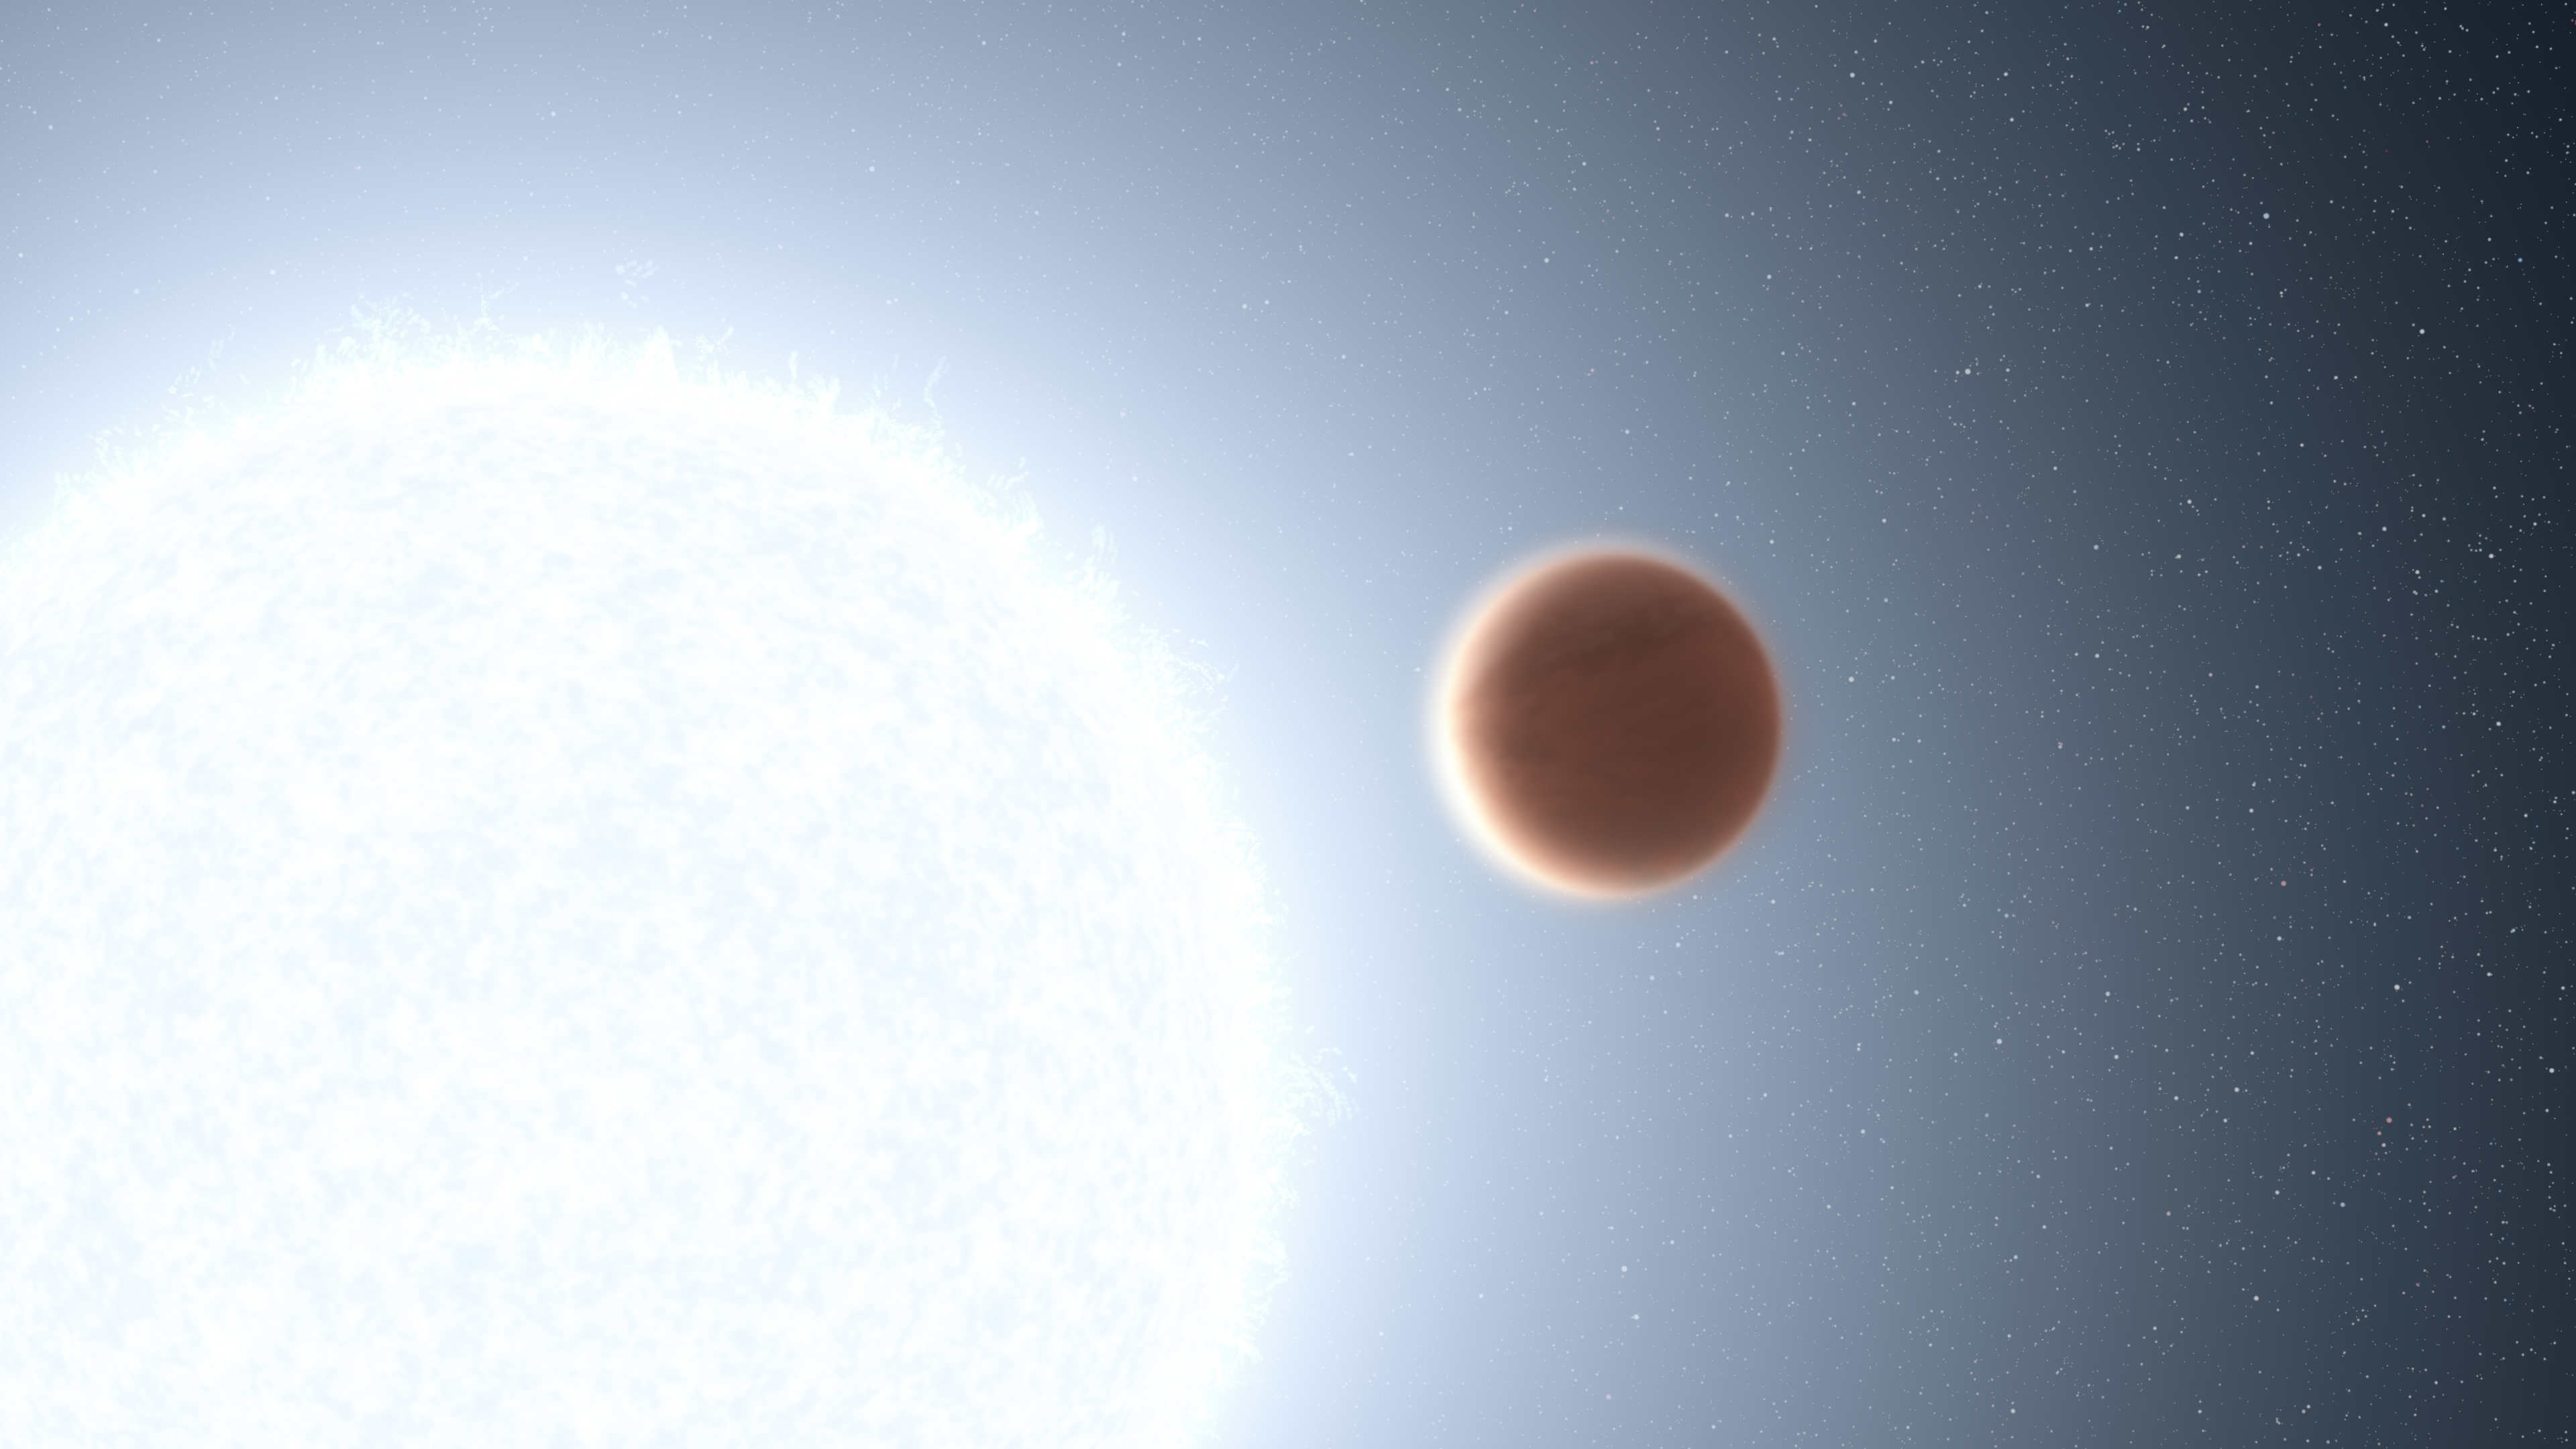

Hubble Probes Extreme Weather On Ultra-Hot Jupiter

This is an artist's impression of the planet KELT-20b which orbits a blue-white star. The giant planet is so close to its star (8 million kilometres) the torrent of ultraviolet radiation from the star heats the planet's atmosphere to over 3,000 degrees Fahrenheit. This creates a thermal layer where the atmosphere increases in temperature with altitude. This is the best evidence to date – gleaned from the NASA/ESA Hubble Space Telescope – for a host star affecting a planet's atmosphere directly. The seething planet is 456 light-years away.

This Hubble research provides dramatic new insights into the vast range of atmospheric conditions on other worlds, and helps astronomers build better theories for making themselves exoplanet weather forecasters. Before thousands of planets around other stars were discovered, astronomers were limited to doing comparative planetology only to the handful of worlds in our solar system.

Credit: NASA, ESA, L. Hustak (STScI)